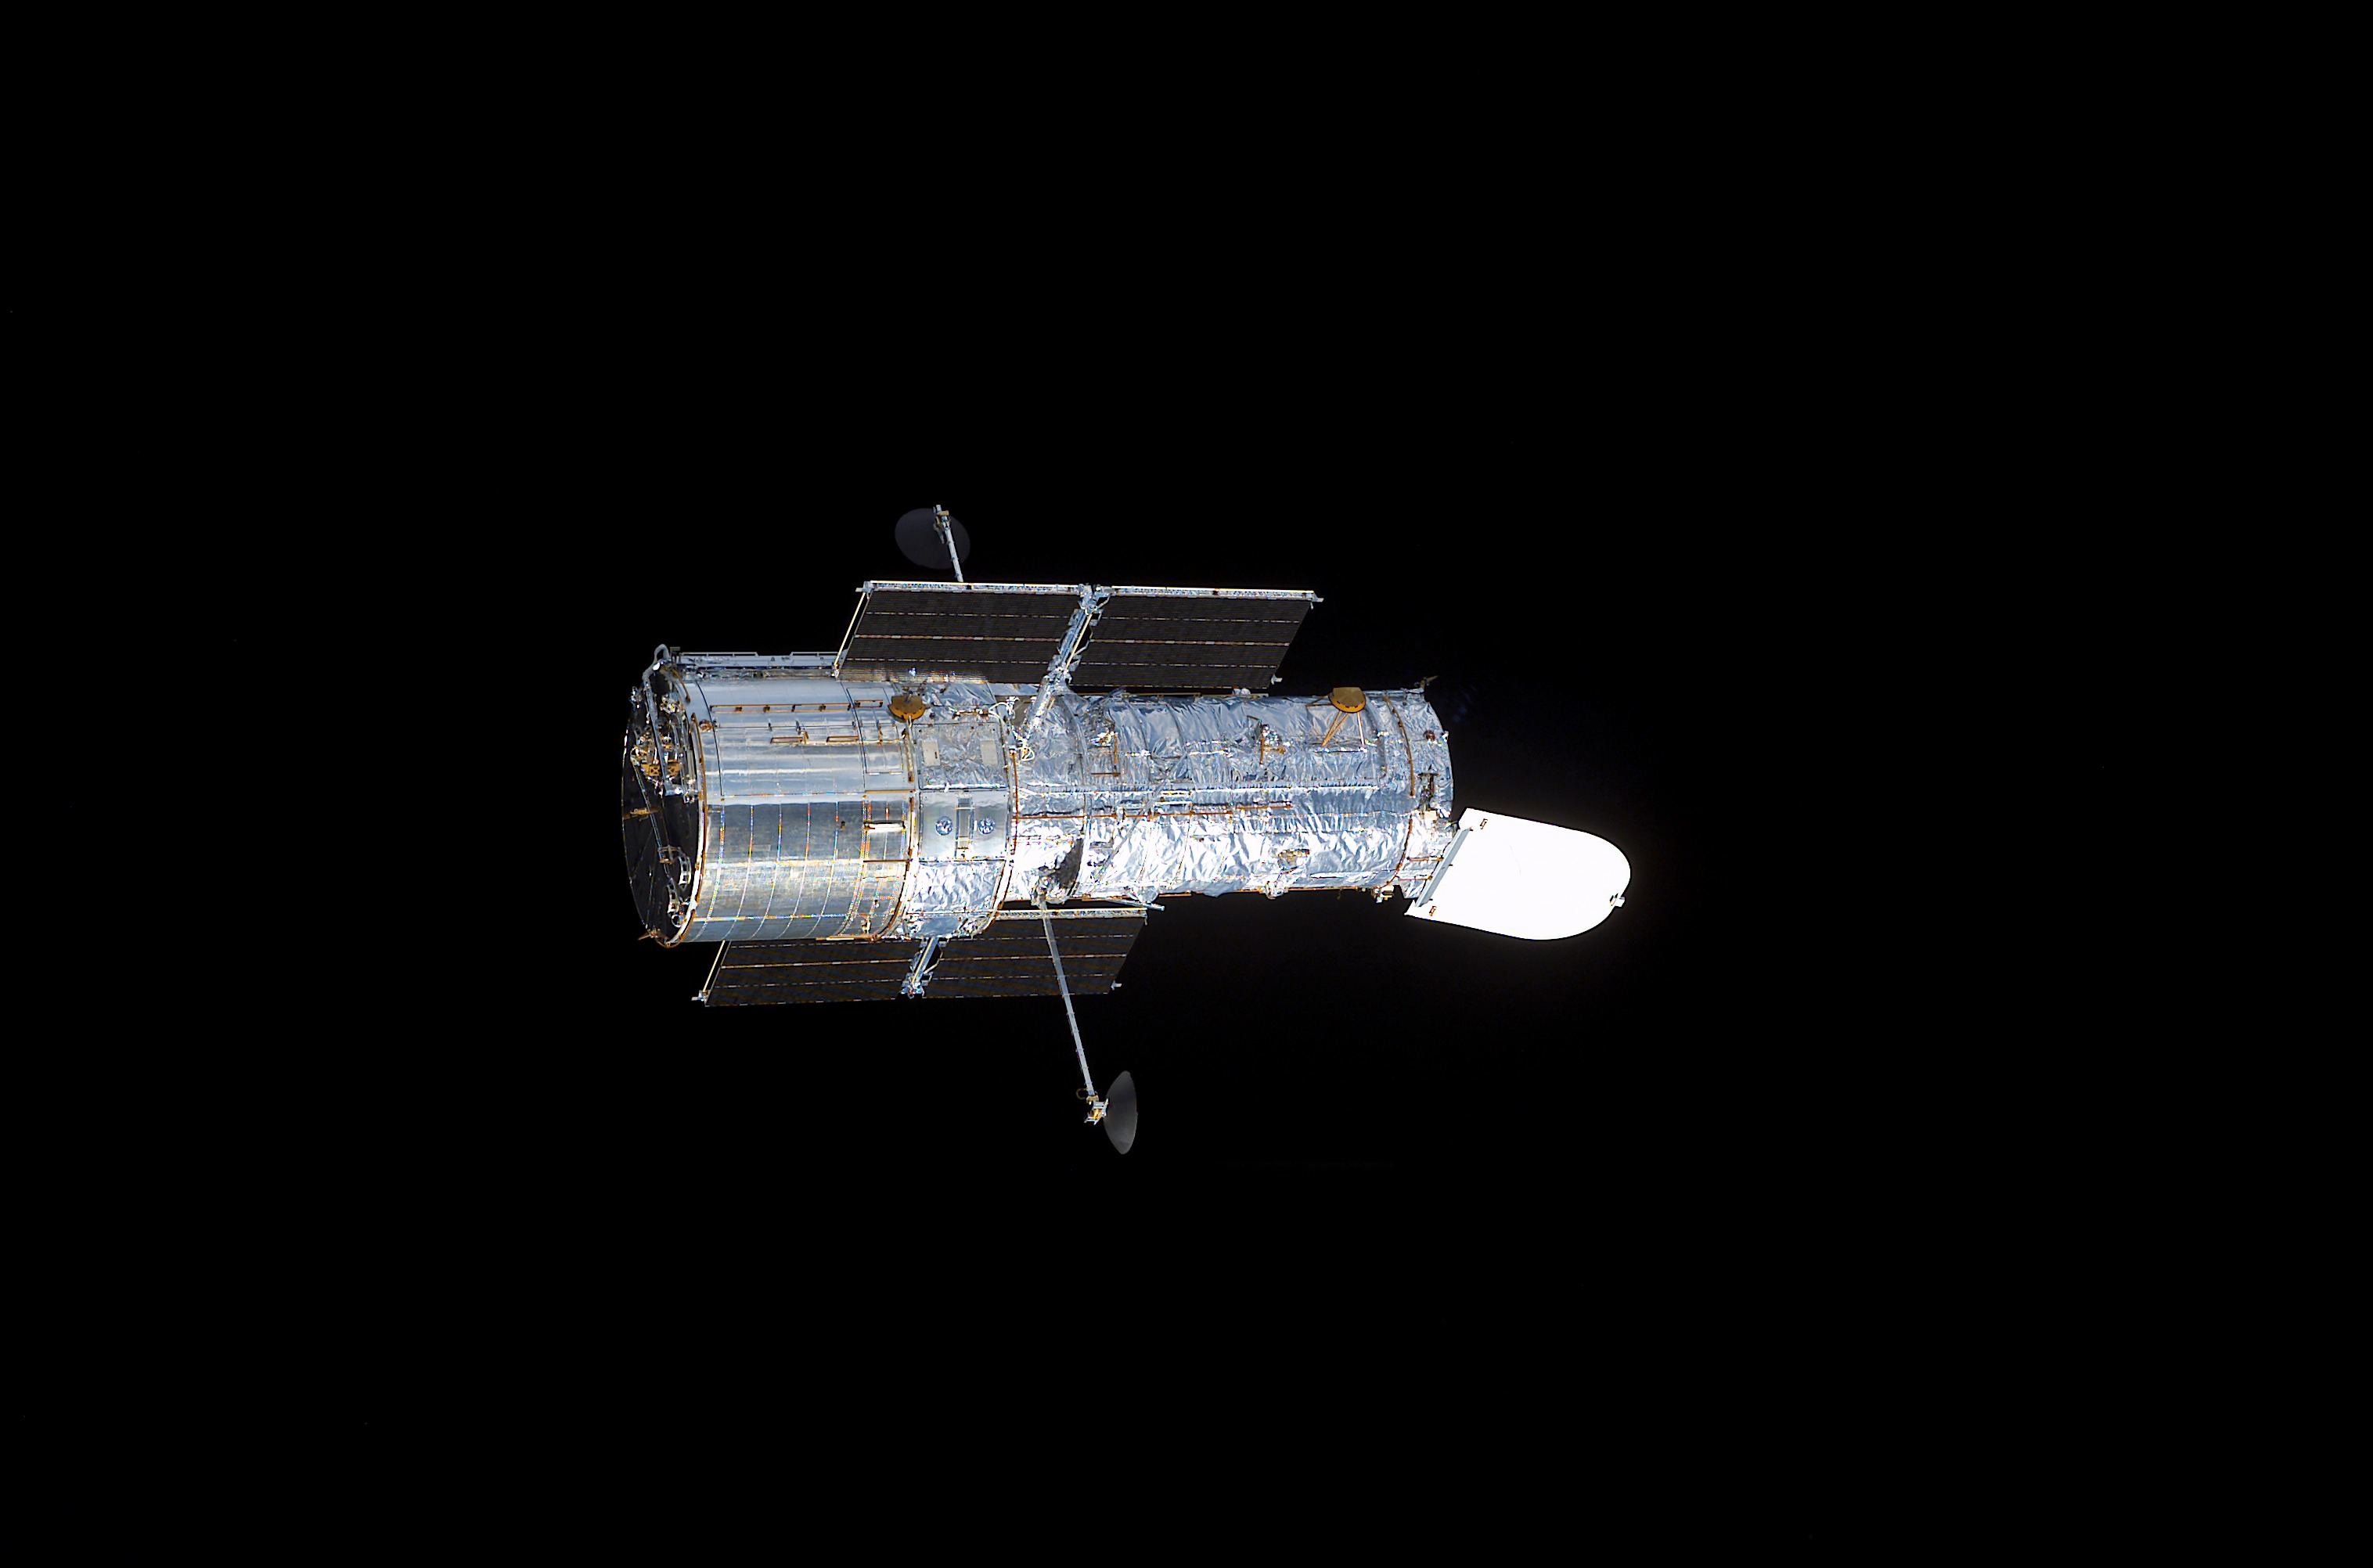

Hubble Space Telescope in space

The NASA/ESA Hubble Space Telescope in space.

Credit: NASA/ESA